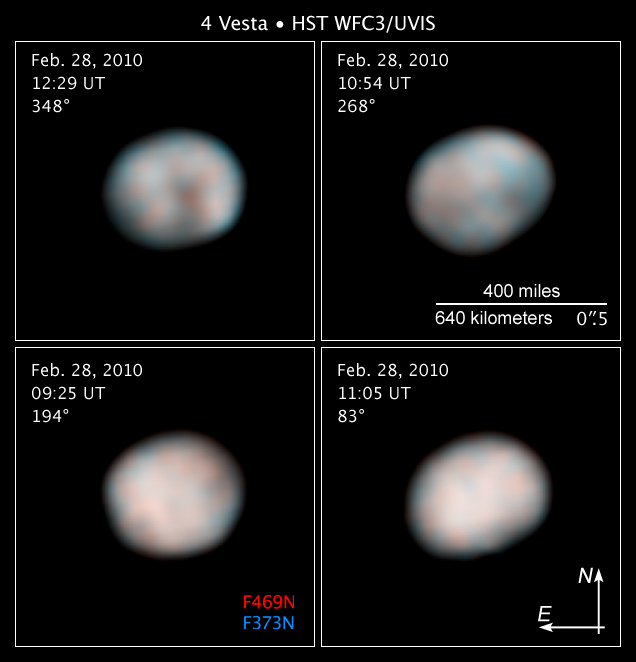

Compass and scale image for Vesta

Compass and scale image for Vesta

Credit: NASA, ESA, and Z. Levay (STScI). Science Credit: NASA, ESA, J.-Y. Li (University of Maryland, College Park), and L. McFadden (NASA/GSFC)